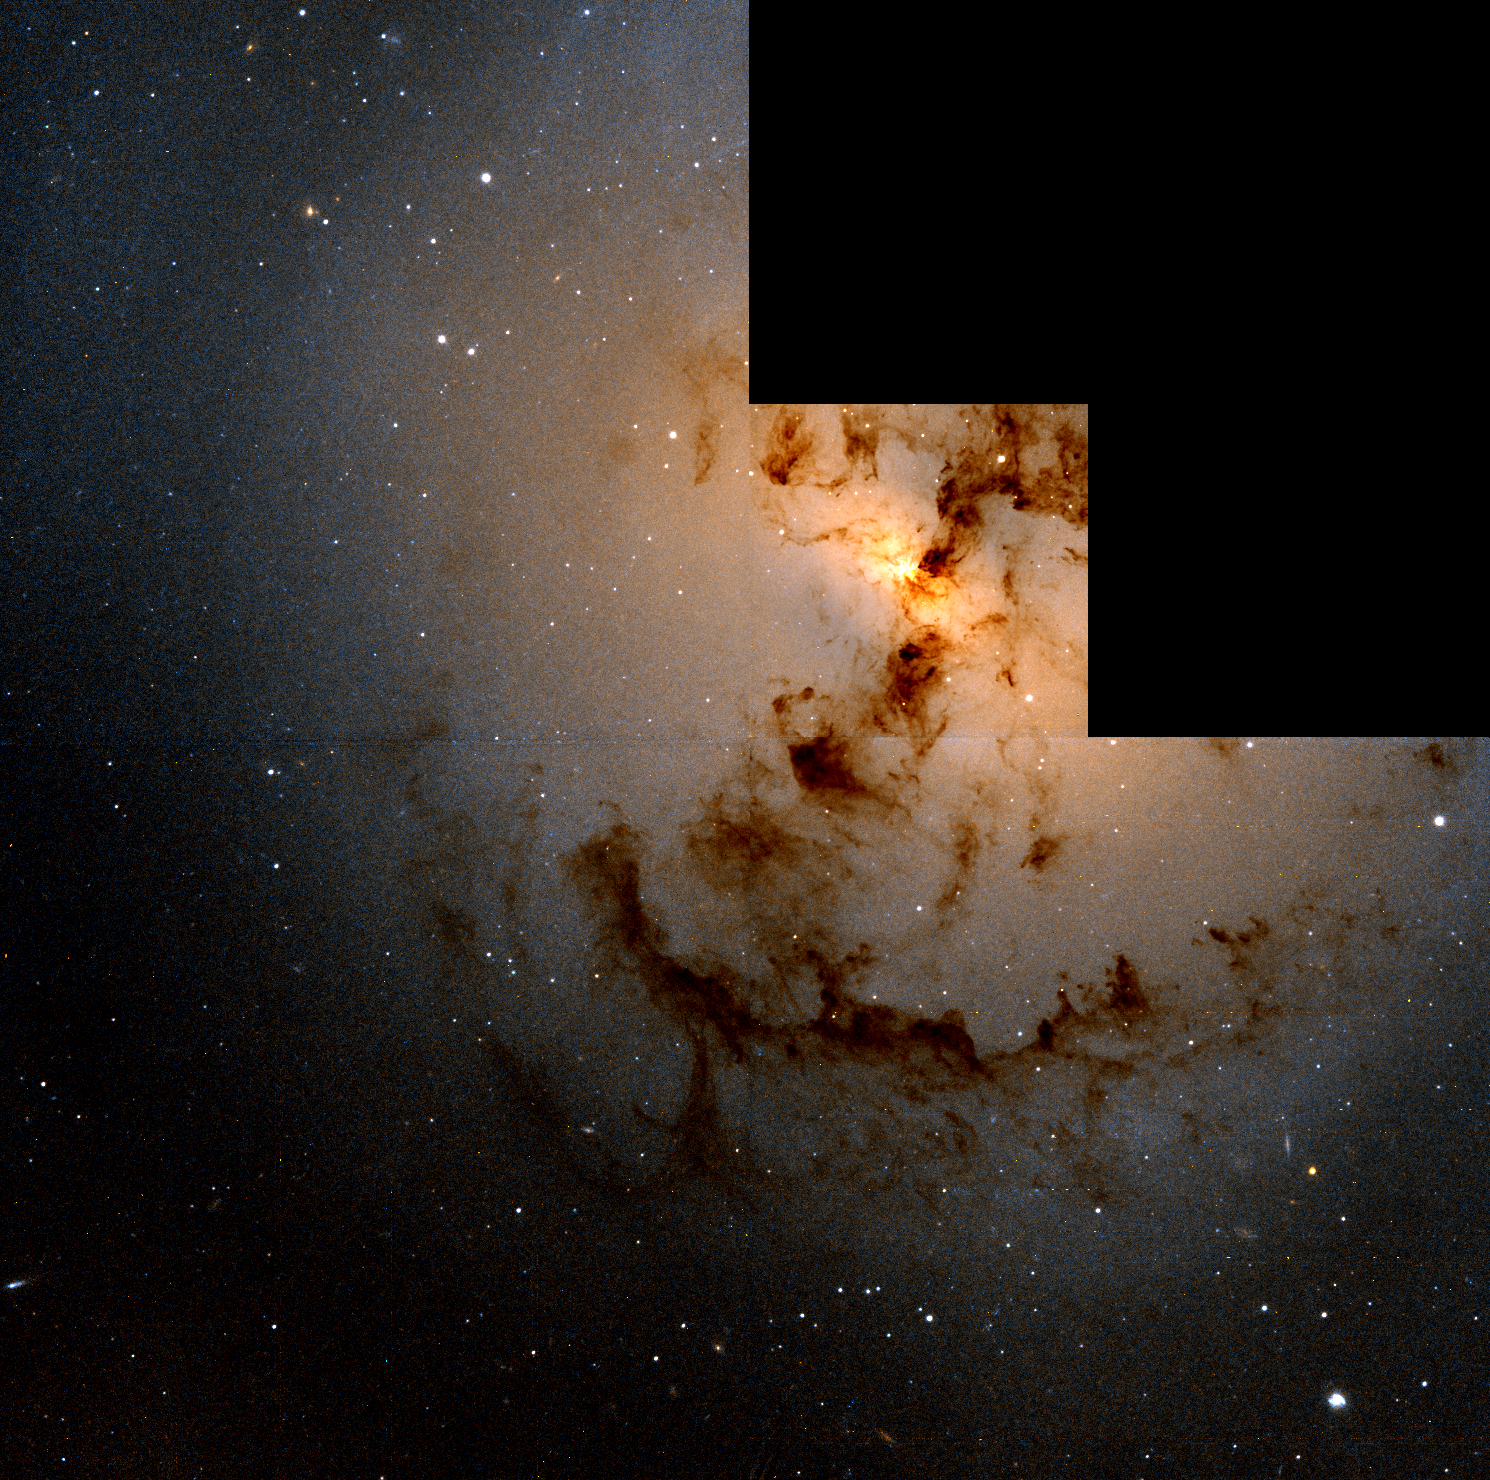

Hubble Finds More Evidence of Galactic Cannibalism

This beautiful, eerie silhouette of dark dust clouds against the glowing nucleus of the elliptical galaxy NGC 1316 may represent the aftermath of a 100 million year old cosmic collision between the elliptical and a smaller companion galaxy.

Credit: Carl Grillmair (California Institute of Technology) and NASA/ESA